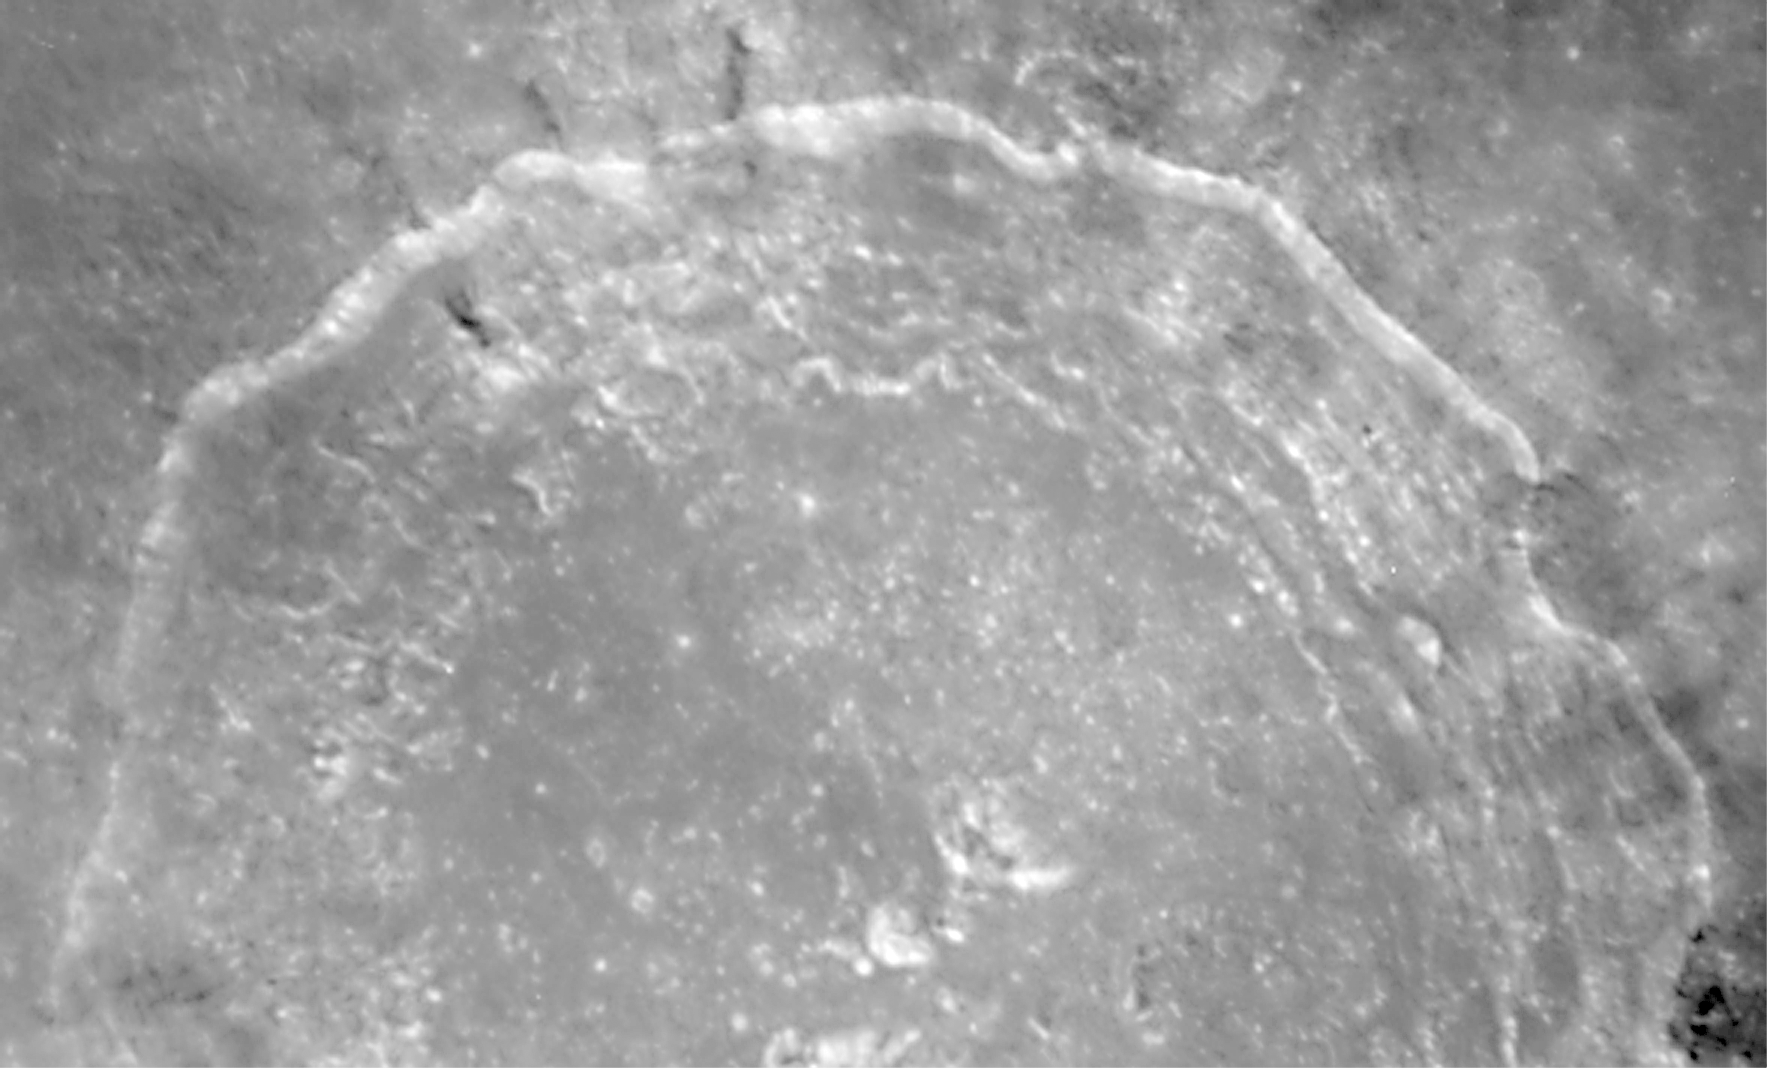

Crater copernicus on the Moon

A close-up view of Copernicus' terraced walls. Hubble can resolve features as small as 280 feet across.

Credit: John Caldwell (York University, Ontario), Alex Storrs (STScI), and NASA/ESA